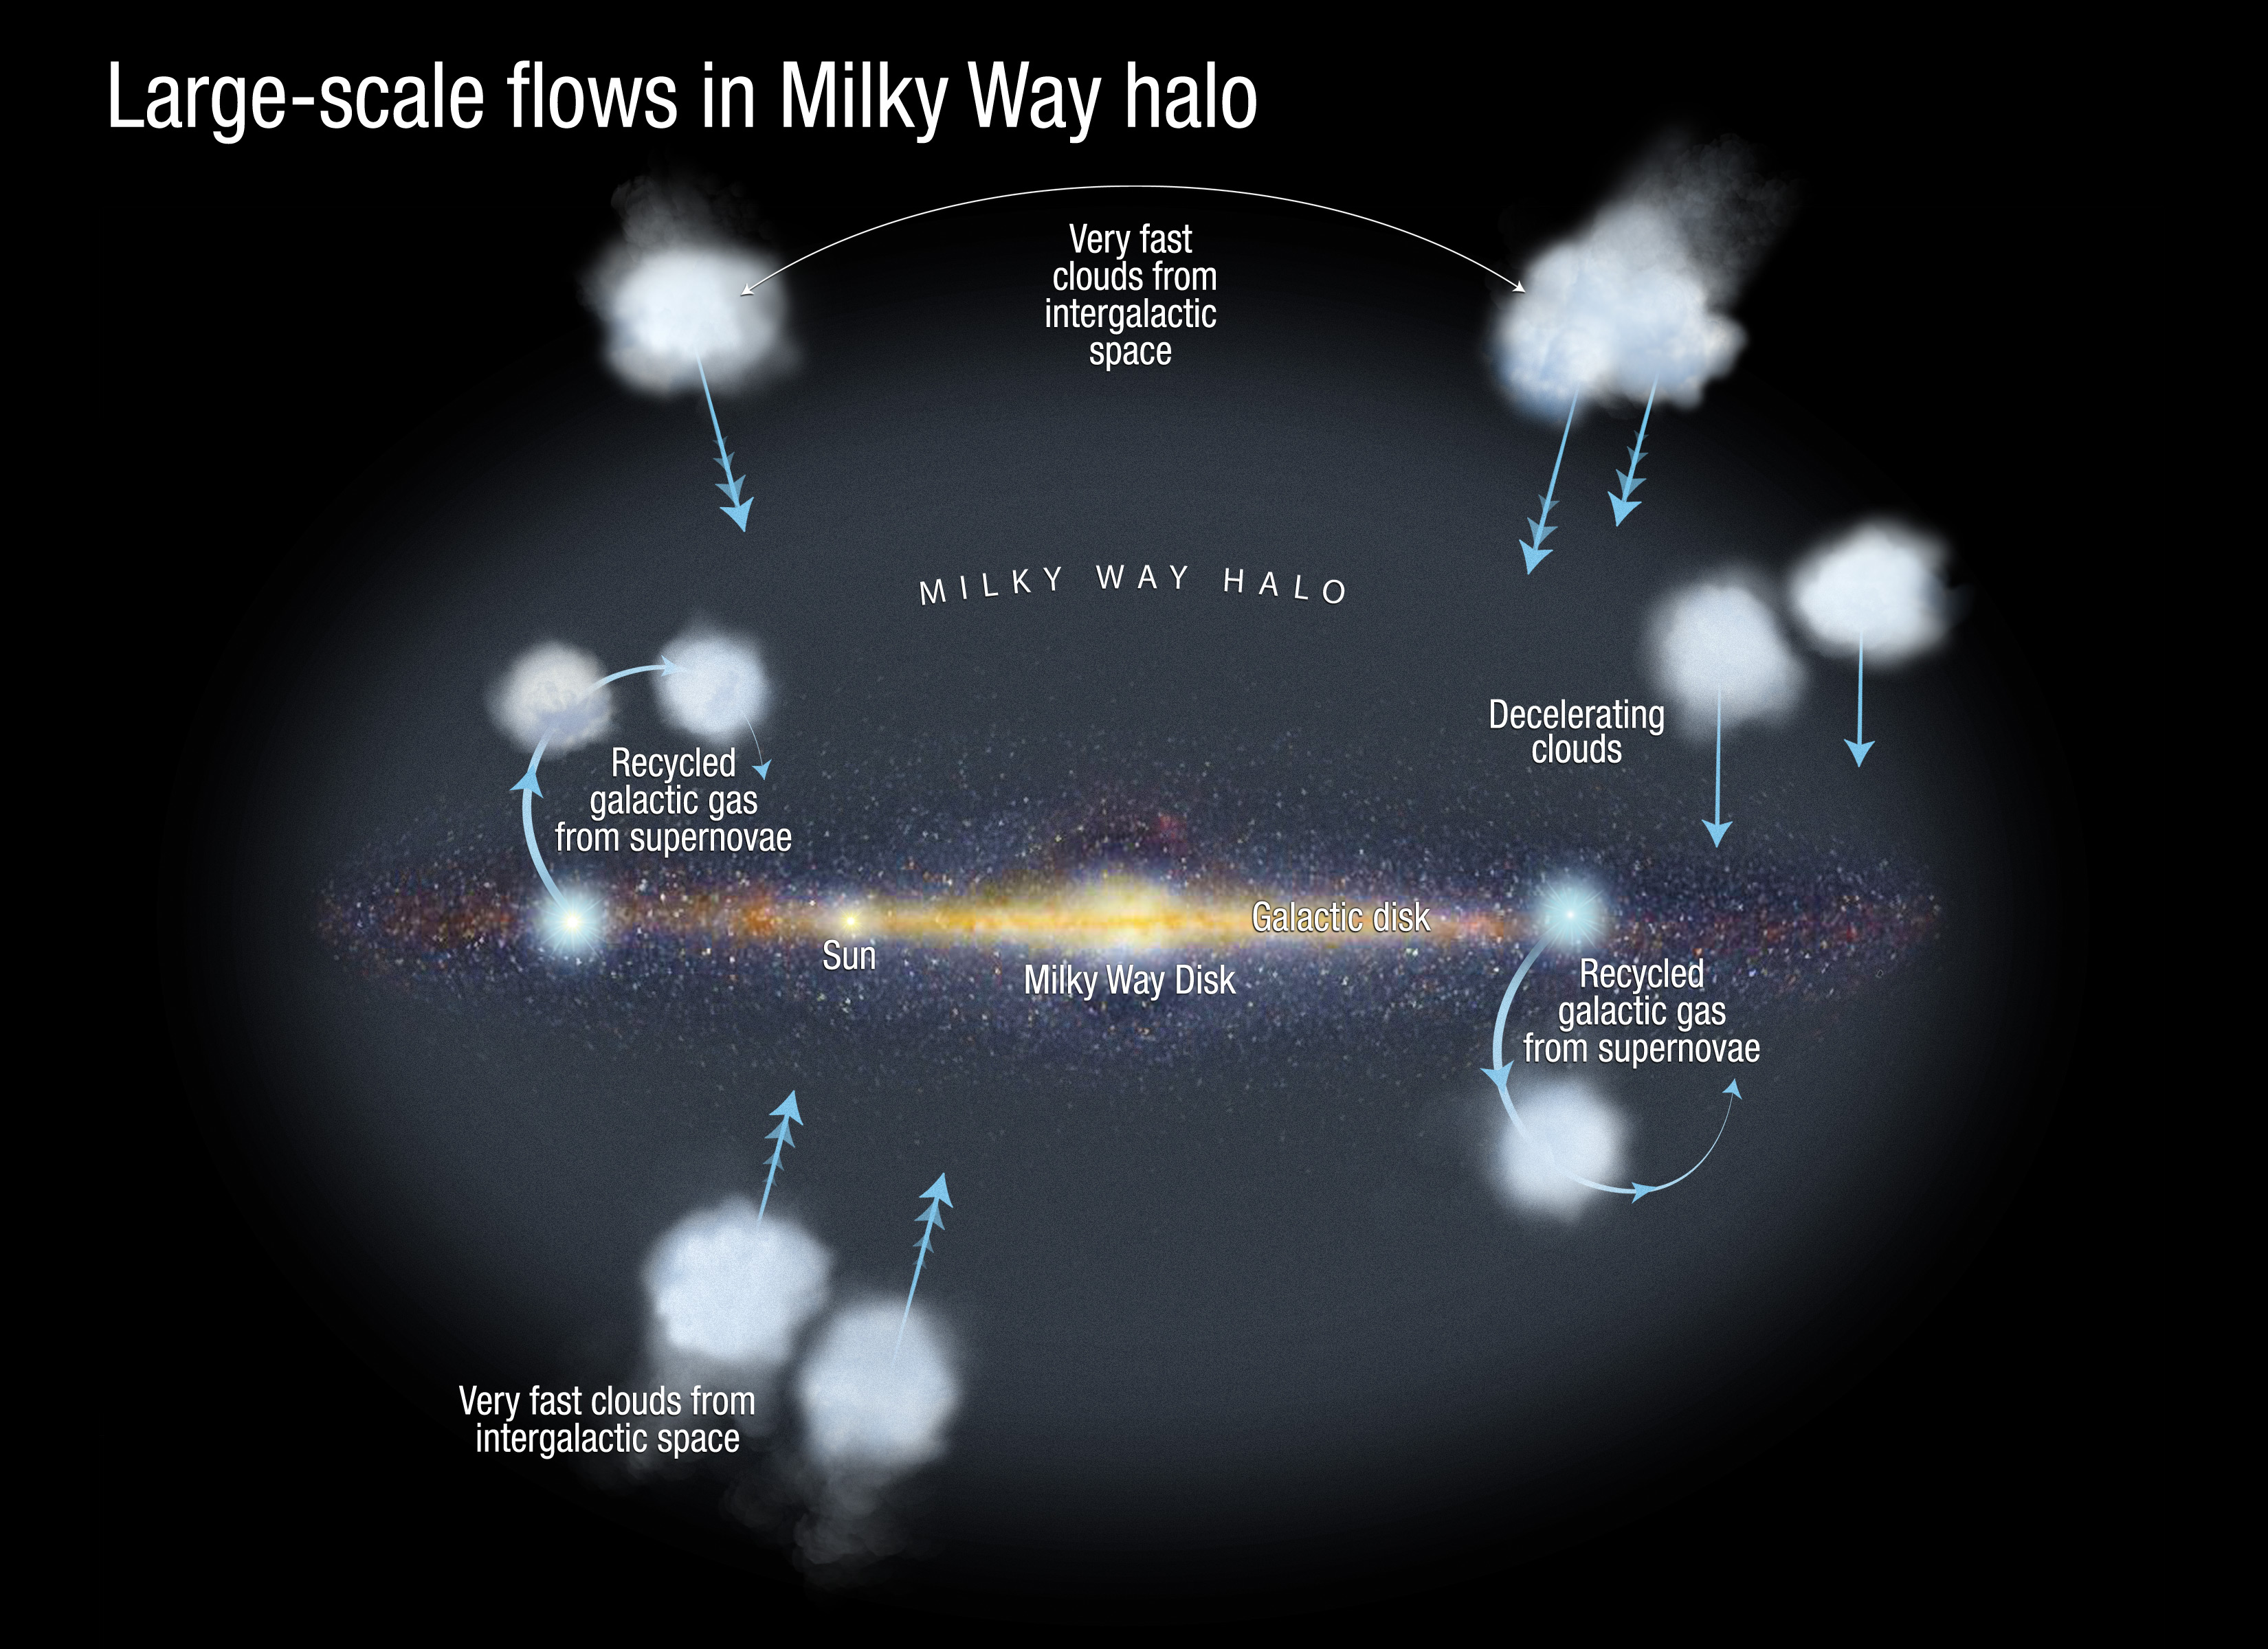

Large-scale flows in the Milky Way halo

This diagram shows the large-scale flows of gas in the Milky Way halo of faint stars and hot gas. Using the Hubble Space Telescope's Cosmic Origins Spectrograph and Space Telescope Imaging Spectrograph, Nicolas Lehner and Chris Howk at the University of Notre Dame were able to directly constrain the distance of the fast-moving ionized clouds responsible for flows of gas in the Milky Way halo. The invisible clouds were detected by finding their absorption signature in the ultraviolet spectra of distant background halo stars. The researchers found that the clouds are reservoirs of gas that enable stars to continue to form in the Milky Way. Without the replenishment from recycled gas and infalling extragalactic material, stars would have stopped forming in the Milky Way a long time ago. This study also suggests the clouds slow down as they approach the Milky Way.

Credit: NASA, ESA, and A. Feild (STScI). Science Credit: NASA, ESA, and N. Lehner and C. Howk (University of Notre Dame)